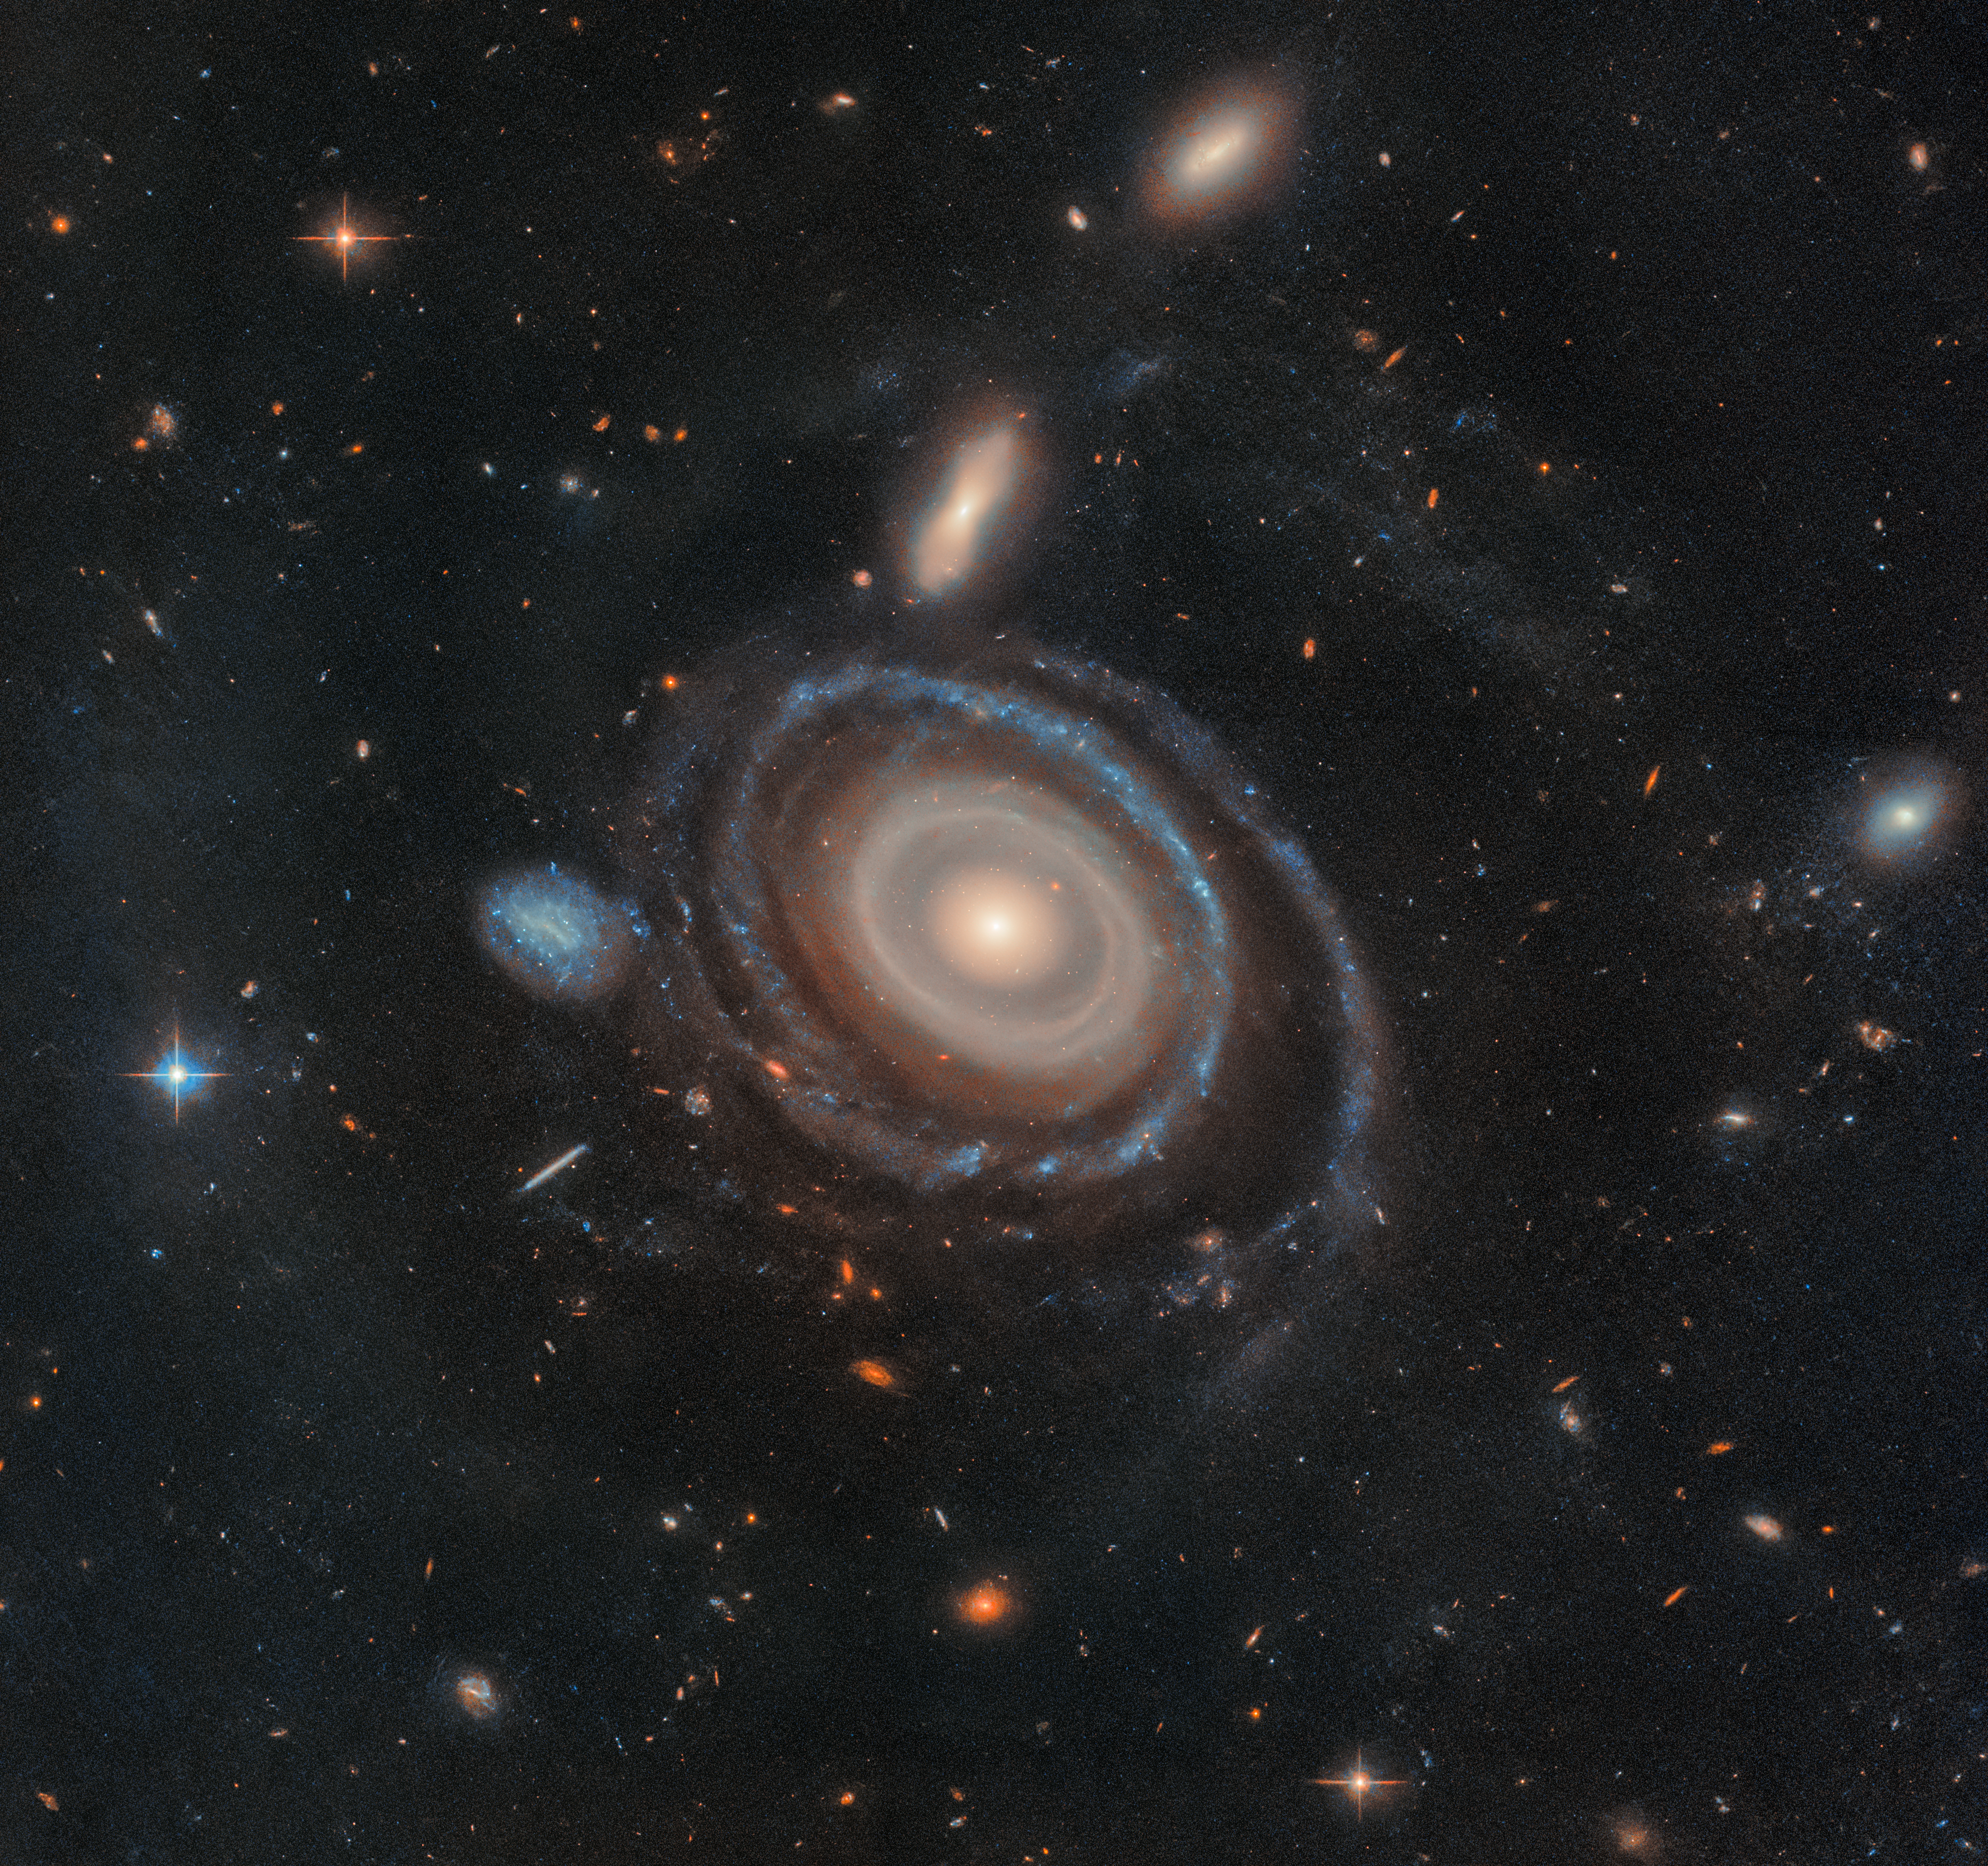

Galaxy LEDA 1313424

High-resolution imagery from the NASA/ESA Hubble Space Telescope has allowed researchers to hone in on more of the Bullseye galaxy’s rings — and helped confirm which galaxy dove through its core.

LEDA 1313424, aptly nicknamed the Bullseye, is two and a half times the size of our Milky Way and has nine rings — six more than any other known galaxy. Hubble has confirmed eight rings, and data from the W. M. Keck Observatory in Hawaii confirmed a ninth. Hubble and Keck also confirmed which galaxy dove through the Bullseye, creating these rings: the blue dwarf galaxy that sits to its immediate center-left. This relatively tiny interloper traveled like a dart through the core of the Bullseye about 50 million years ago, leaving rings in its wake like ripples in a pond. A thin trail of gas now links the pair, though they are currently separated by 130,000 light-years.

The team’s paper was published on 4 February 2025 in The Astrophysical Journal Letters.

Credit: NASA, ESA, I. Pasha (Yale), P. van Dokkum (Yale)